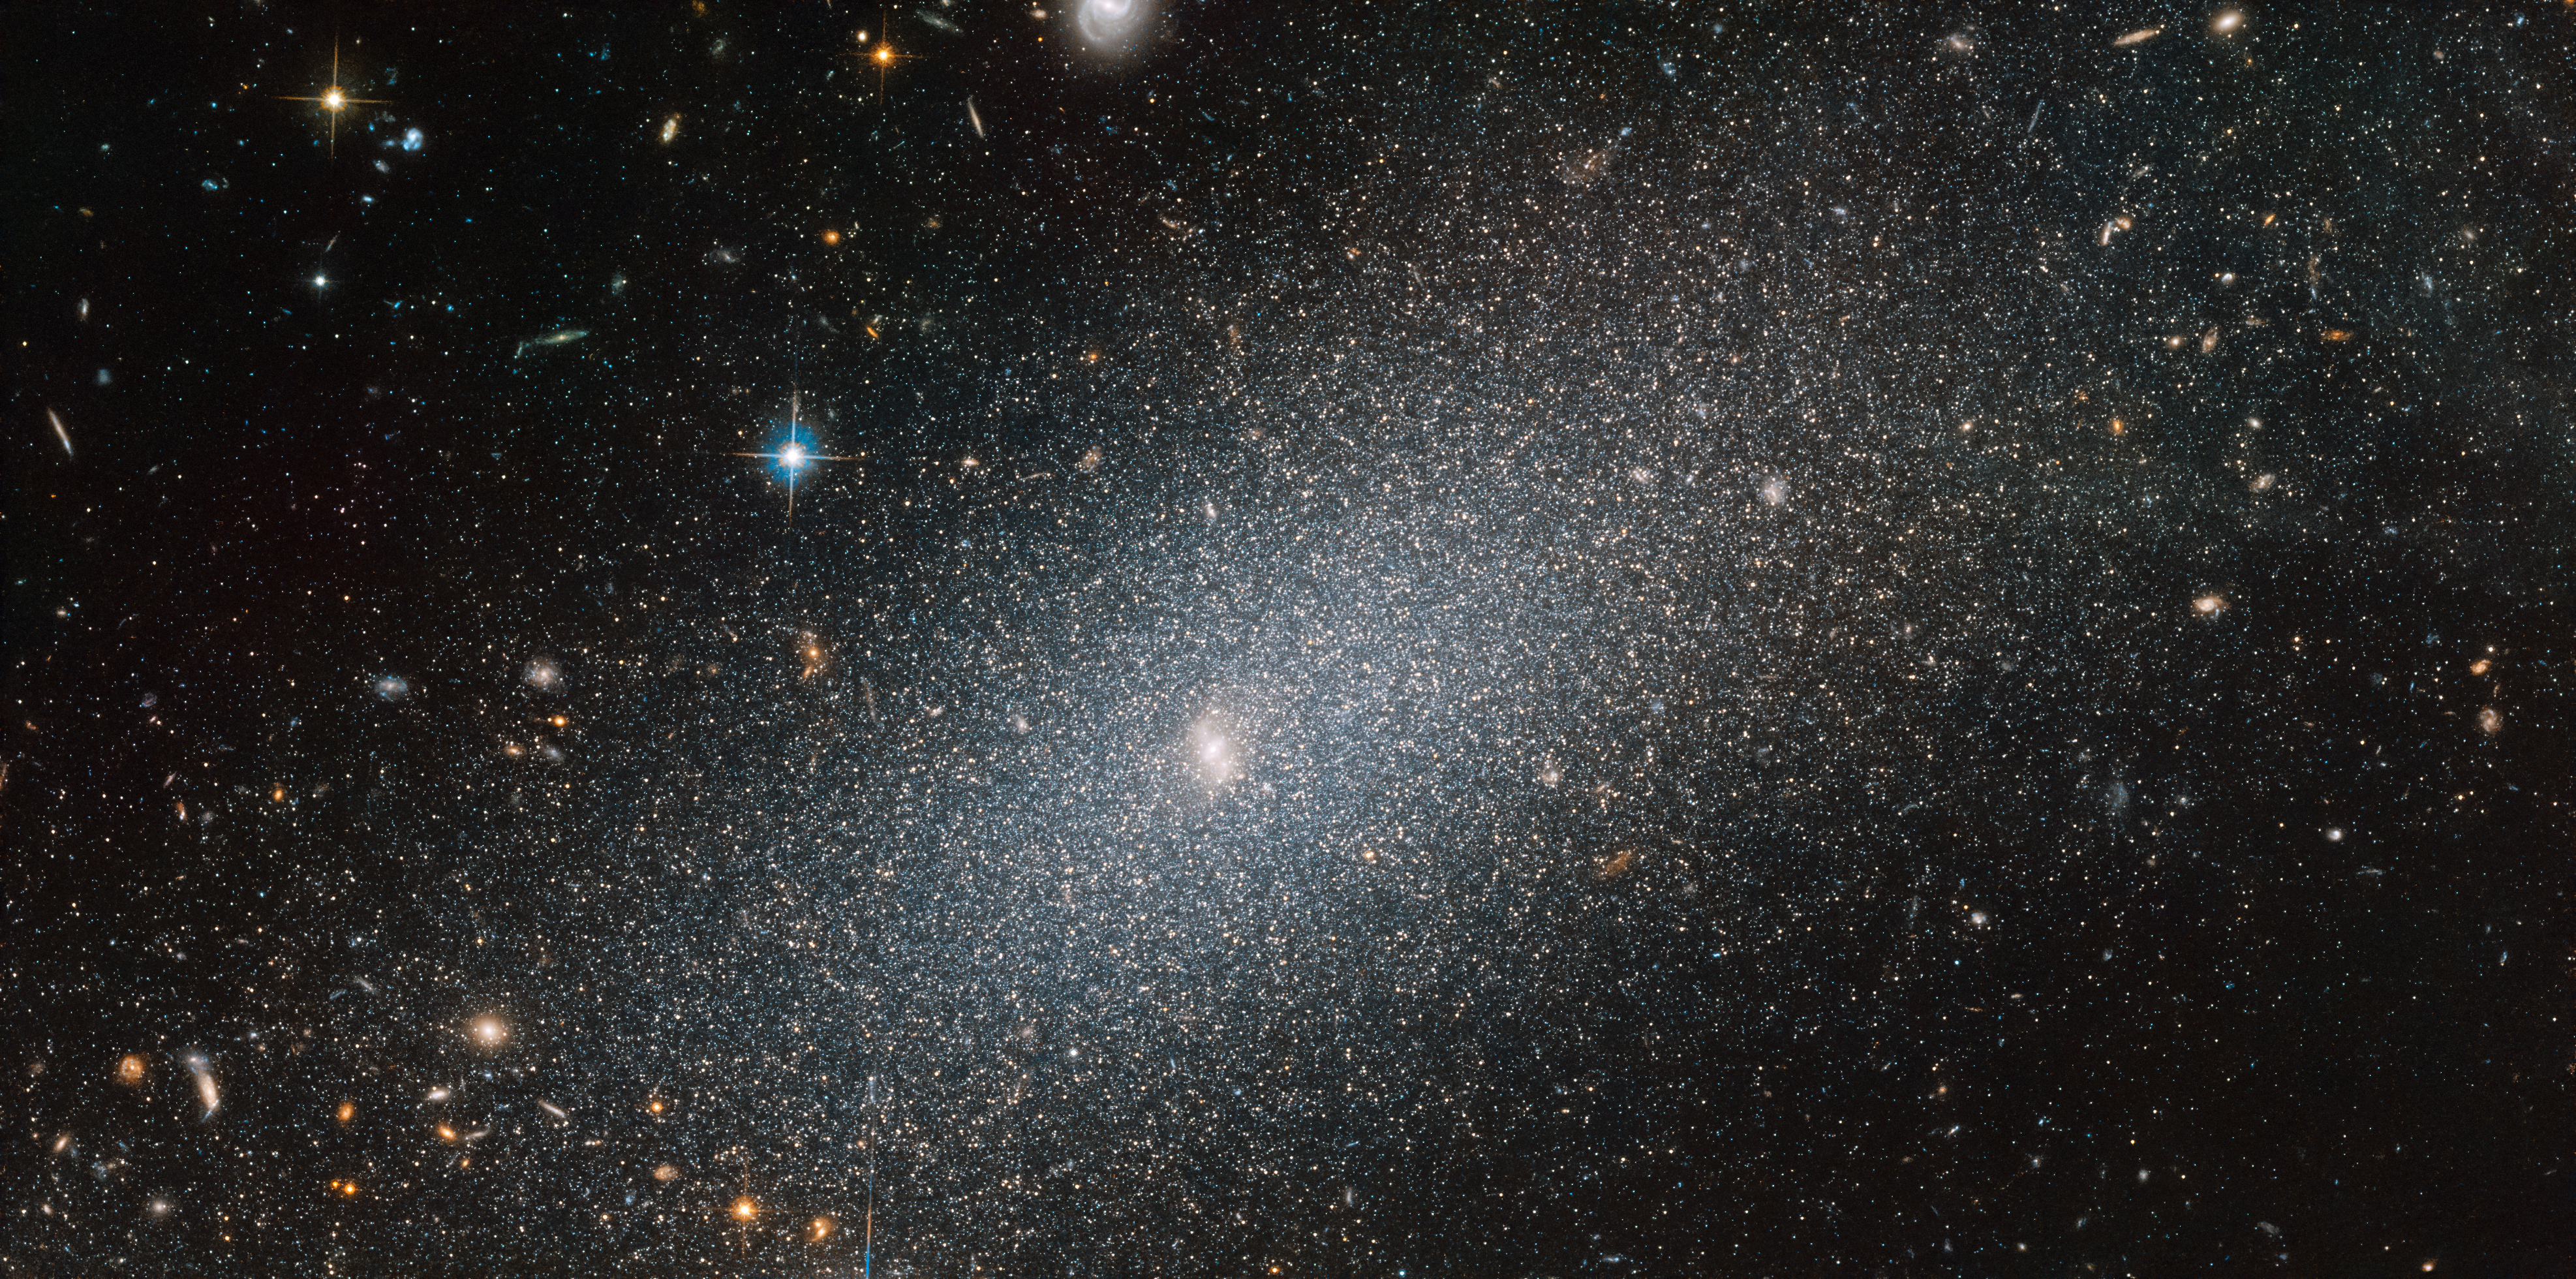

Stealing the Show

As beautiful as the surrounding space may be, the sparkling galaxy in the foreground of this image from the NASA/ESA Hubble Space Telescope undeniably steals the show.

This spotlight-hogging galaxy, seen set against a backdrop of more distant galaxies of all shapes and sizes, is known as PGC 29388. Although it dominates in this image, this galaxy is a small player on the cosmic stage, and is known as a dwarf elliptical galaxy. As the “dwarf” moniker suggests, the galaxy is on the smaller side, and boasts a “mere” 100 million to a few billion stars — a very small number indeed when compared to the Milky Way's population of around 250 to 400 billion stellar residents.

Credit: ESA/Hubble & NASA, T. Armandroff